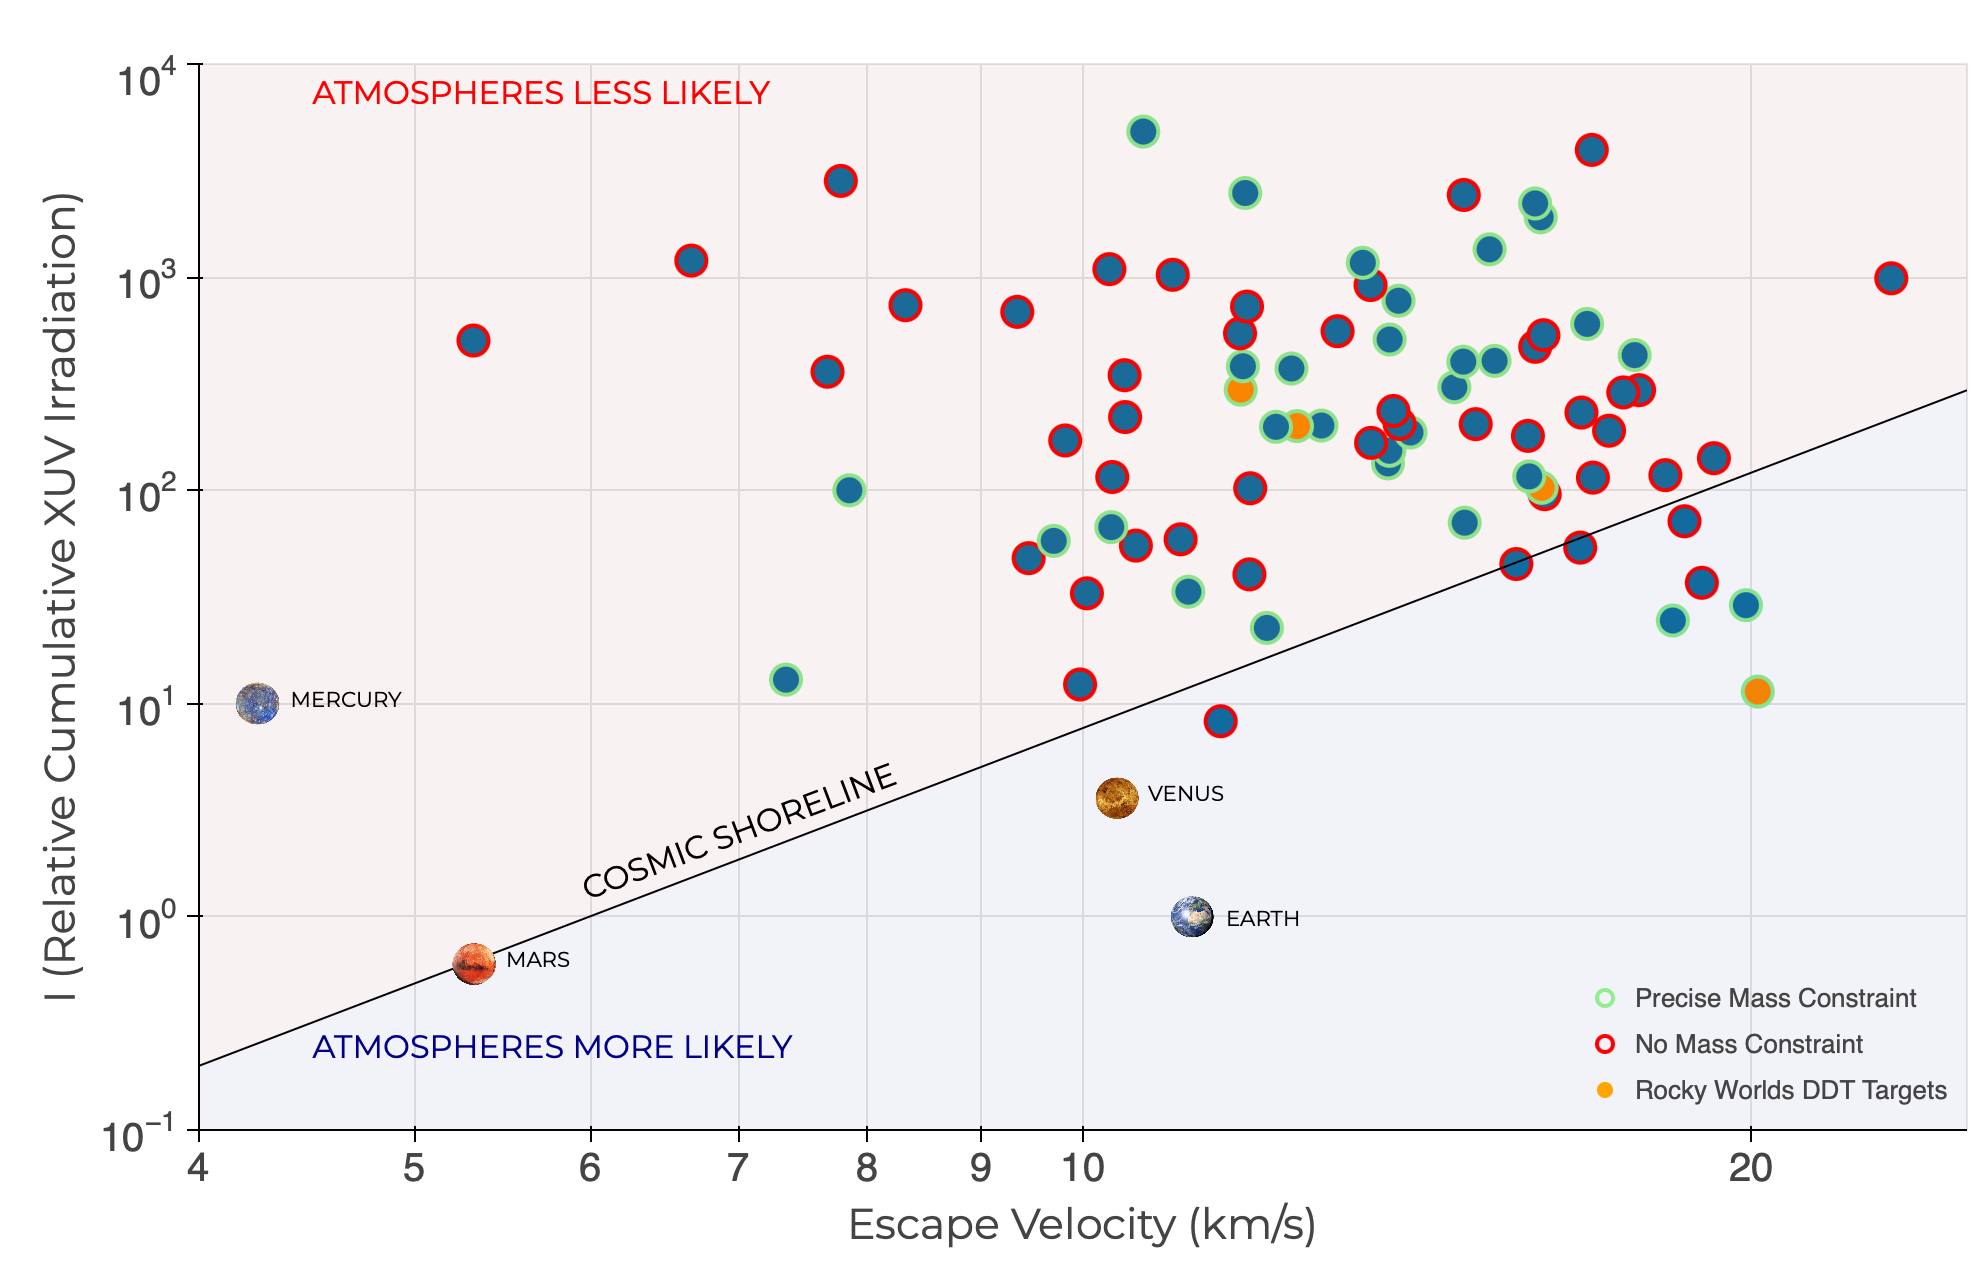

Candidate targets for the Rocky Worlds DDT programme

Candidate targets for the Rocky Worlds DDT programme in the context of the ‘Cosmic Shoreline’, including the first four selected targets (highlighted in orange).

Credit: Néstor Espinoza & Mees Fix (STScI)